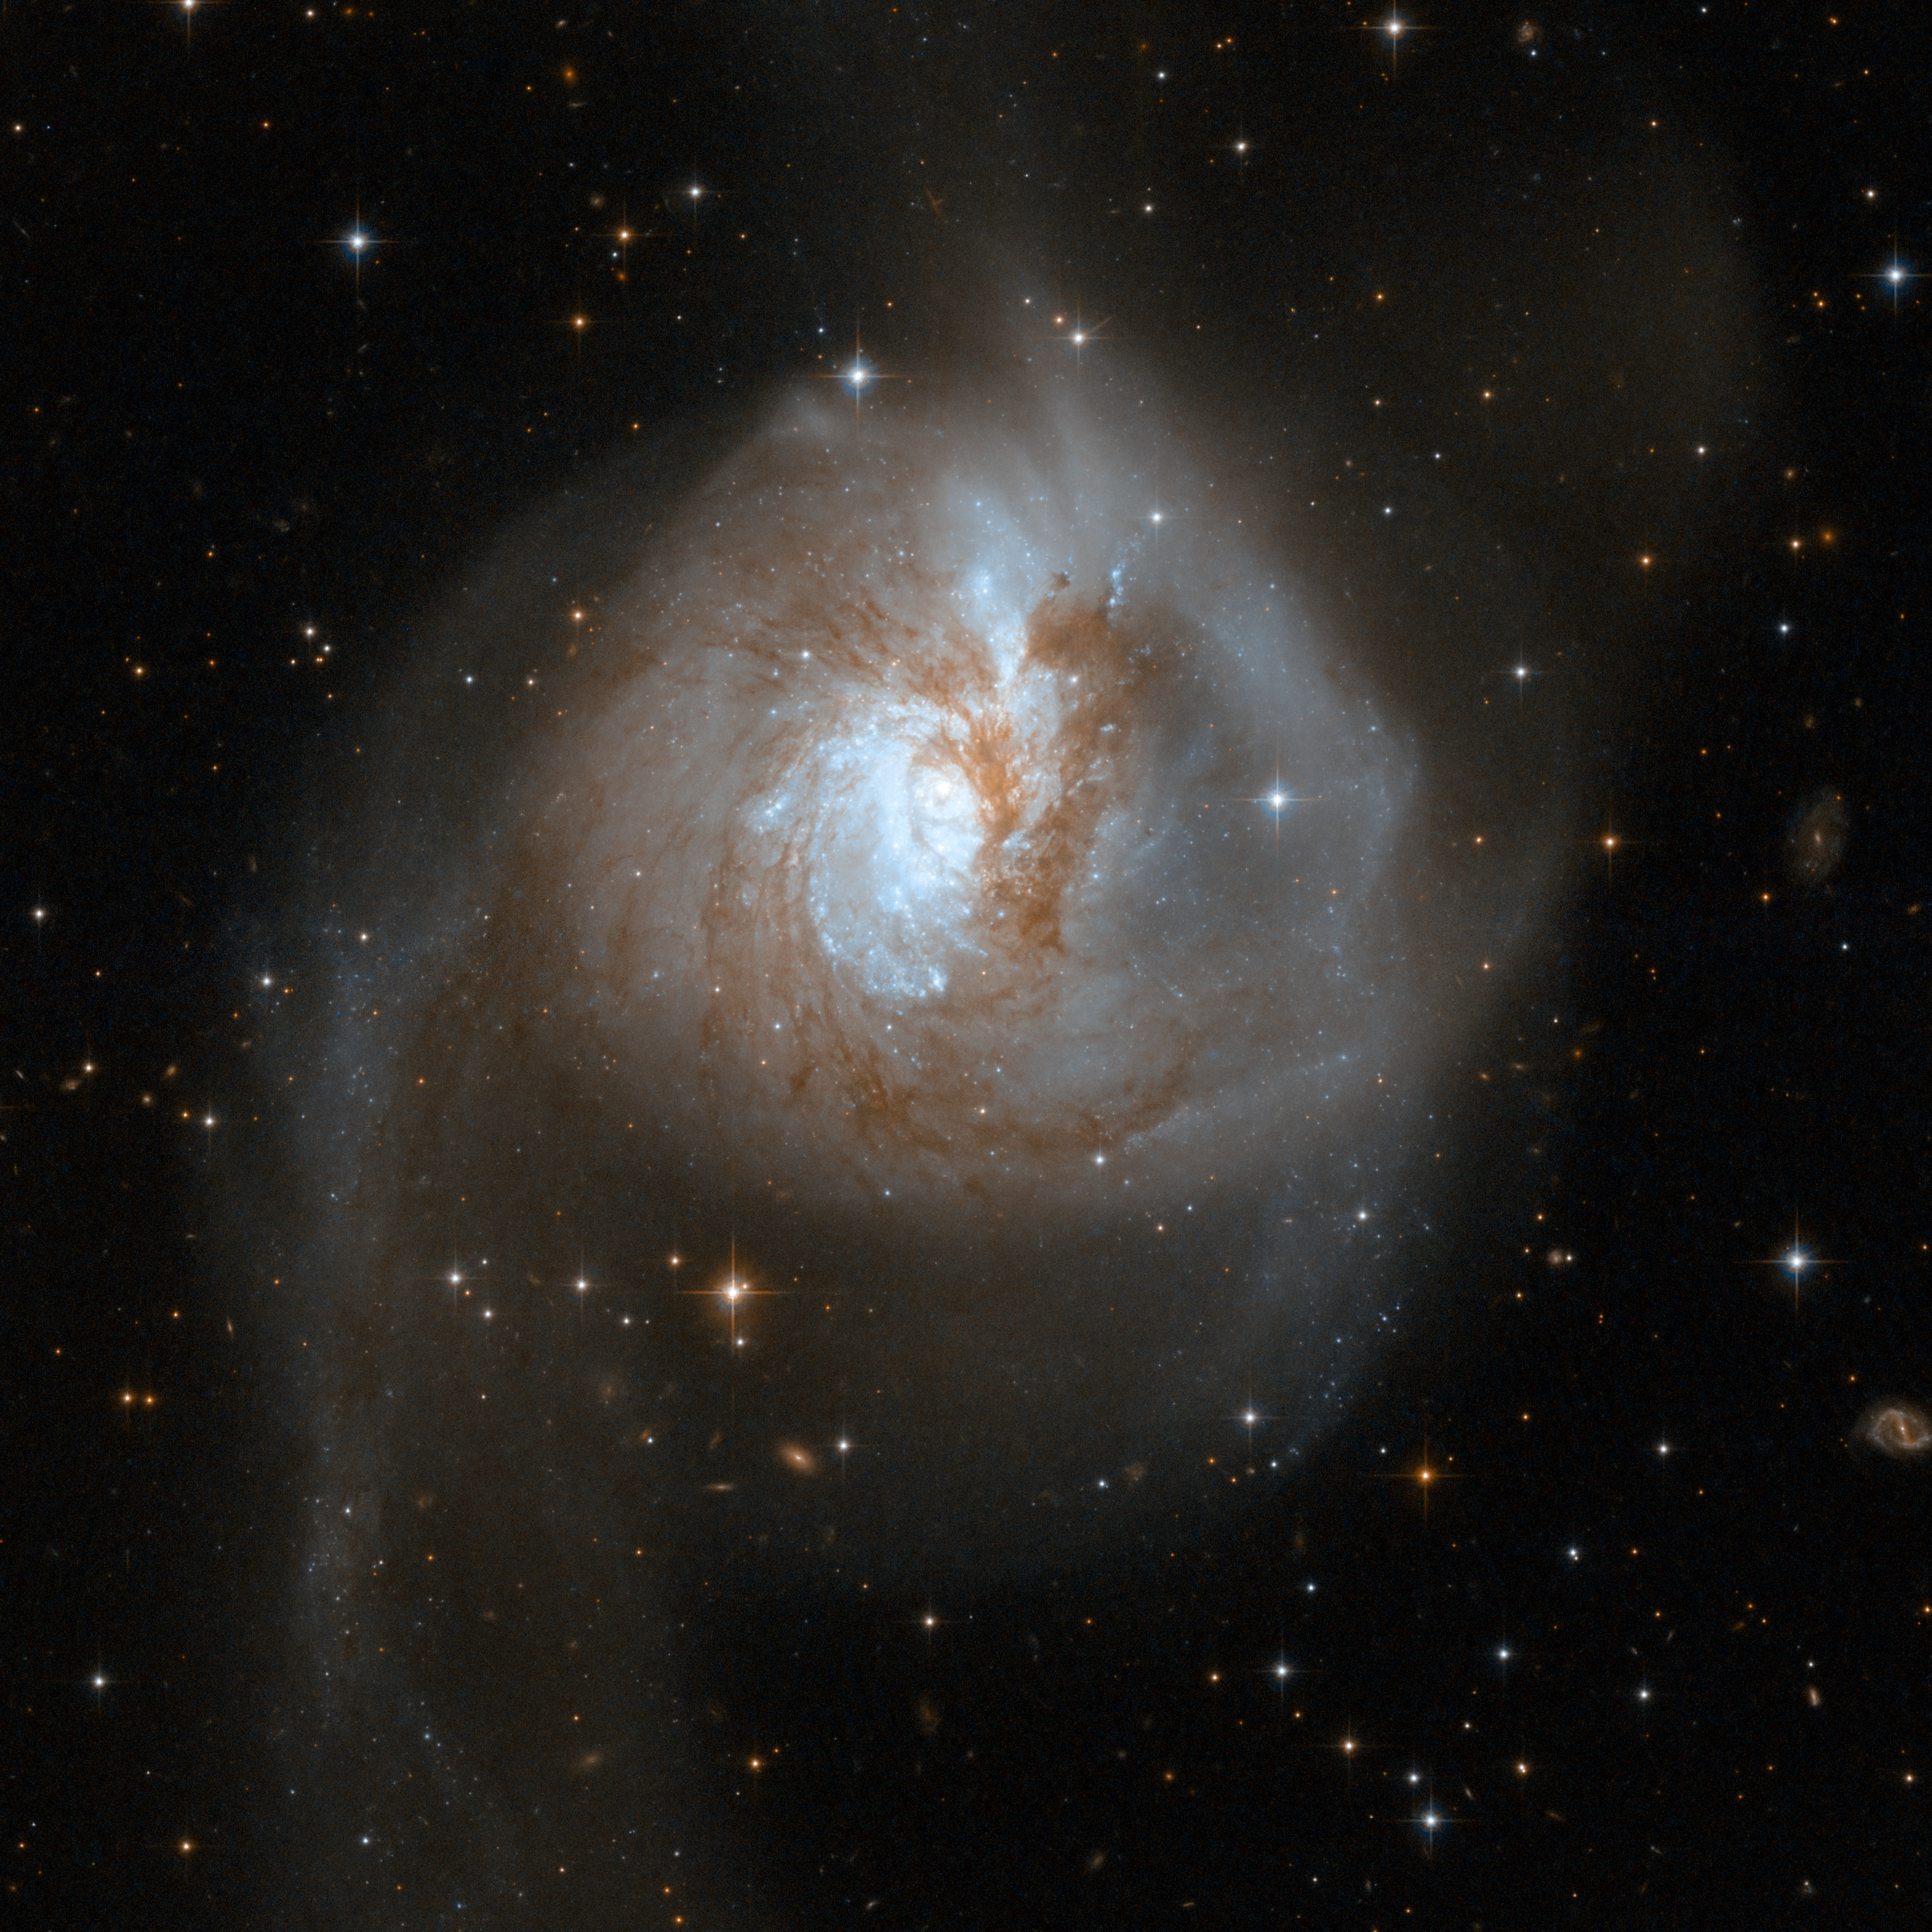

NGC 3256

NGC 3256 is an impressive example of a peculiar galaxy that is actually the relict of a collision of two separate galaxies that took place in a distant past. The telltale signs of the collision are two extended luminous tails swirling out from the galaxy. NGC 3256 belongs to the Hydra-Centaurus supercluster complex and provides a nearby template for studying the properties of young star clusters in tidal tails. The system hides a double nucleus and a tangle of dust lanes in the central region. The tails are studded with a particularly high density of star clusters.

This image is part of a large collection of 59 images of merging galaxies taken by the Hubble Space Telescope and released on the occasion of its 18th anniversary on 24th April 2008.

Credit: NASA, ESA, the Hubble Heritage Team (STScI/AURA)-ESA/Hubble Collaboration and A. Evans (University of Virginia, Charlottesville/NRAO/Stony Brook University)